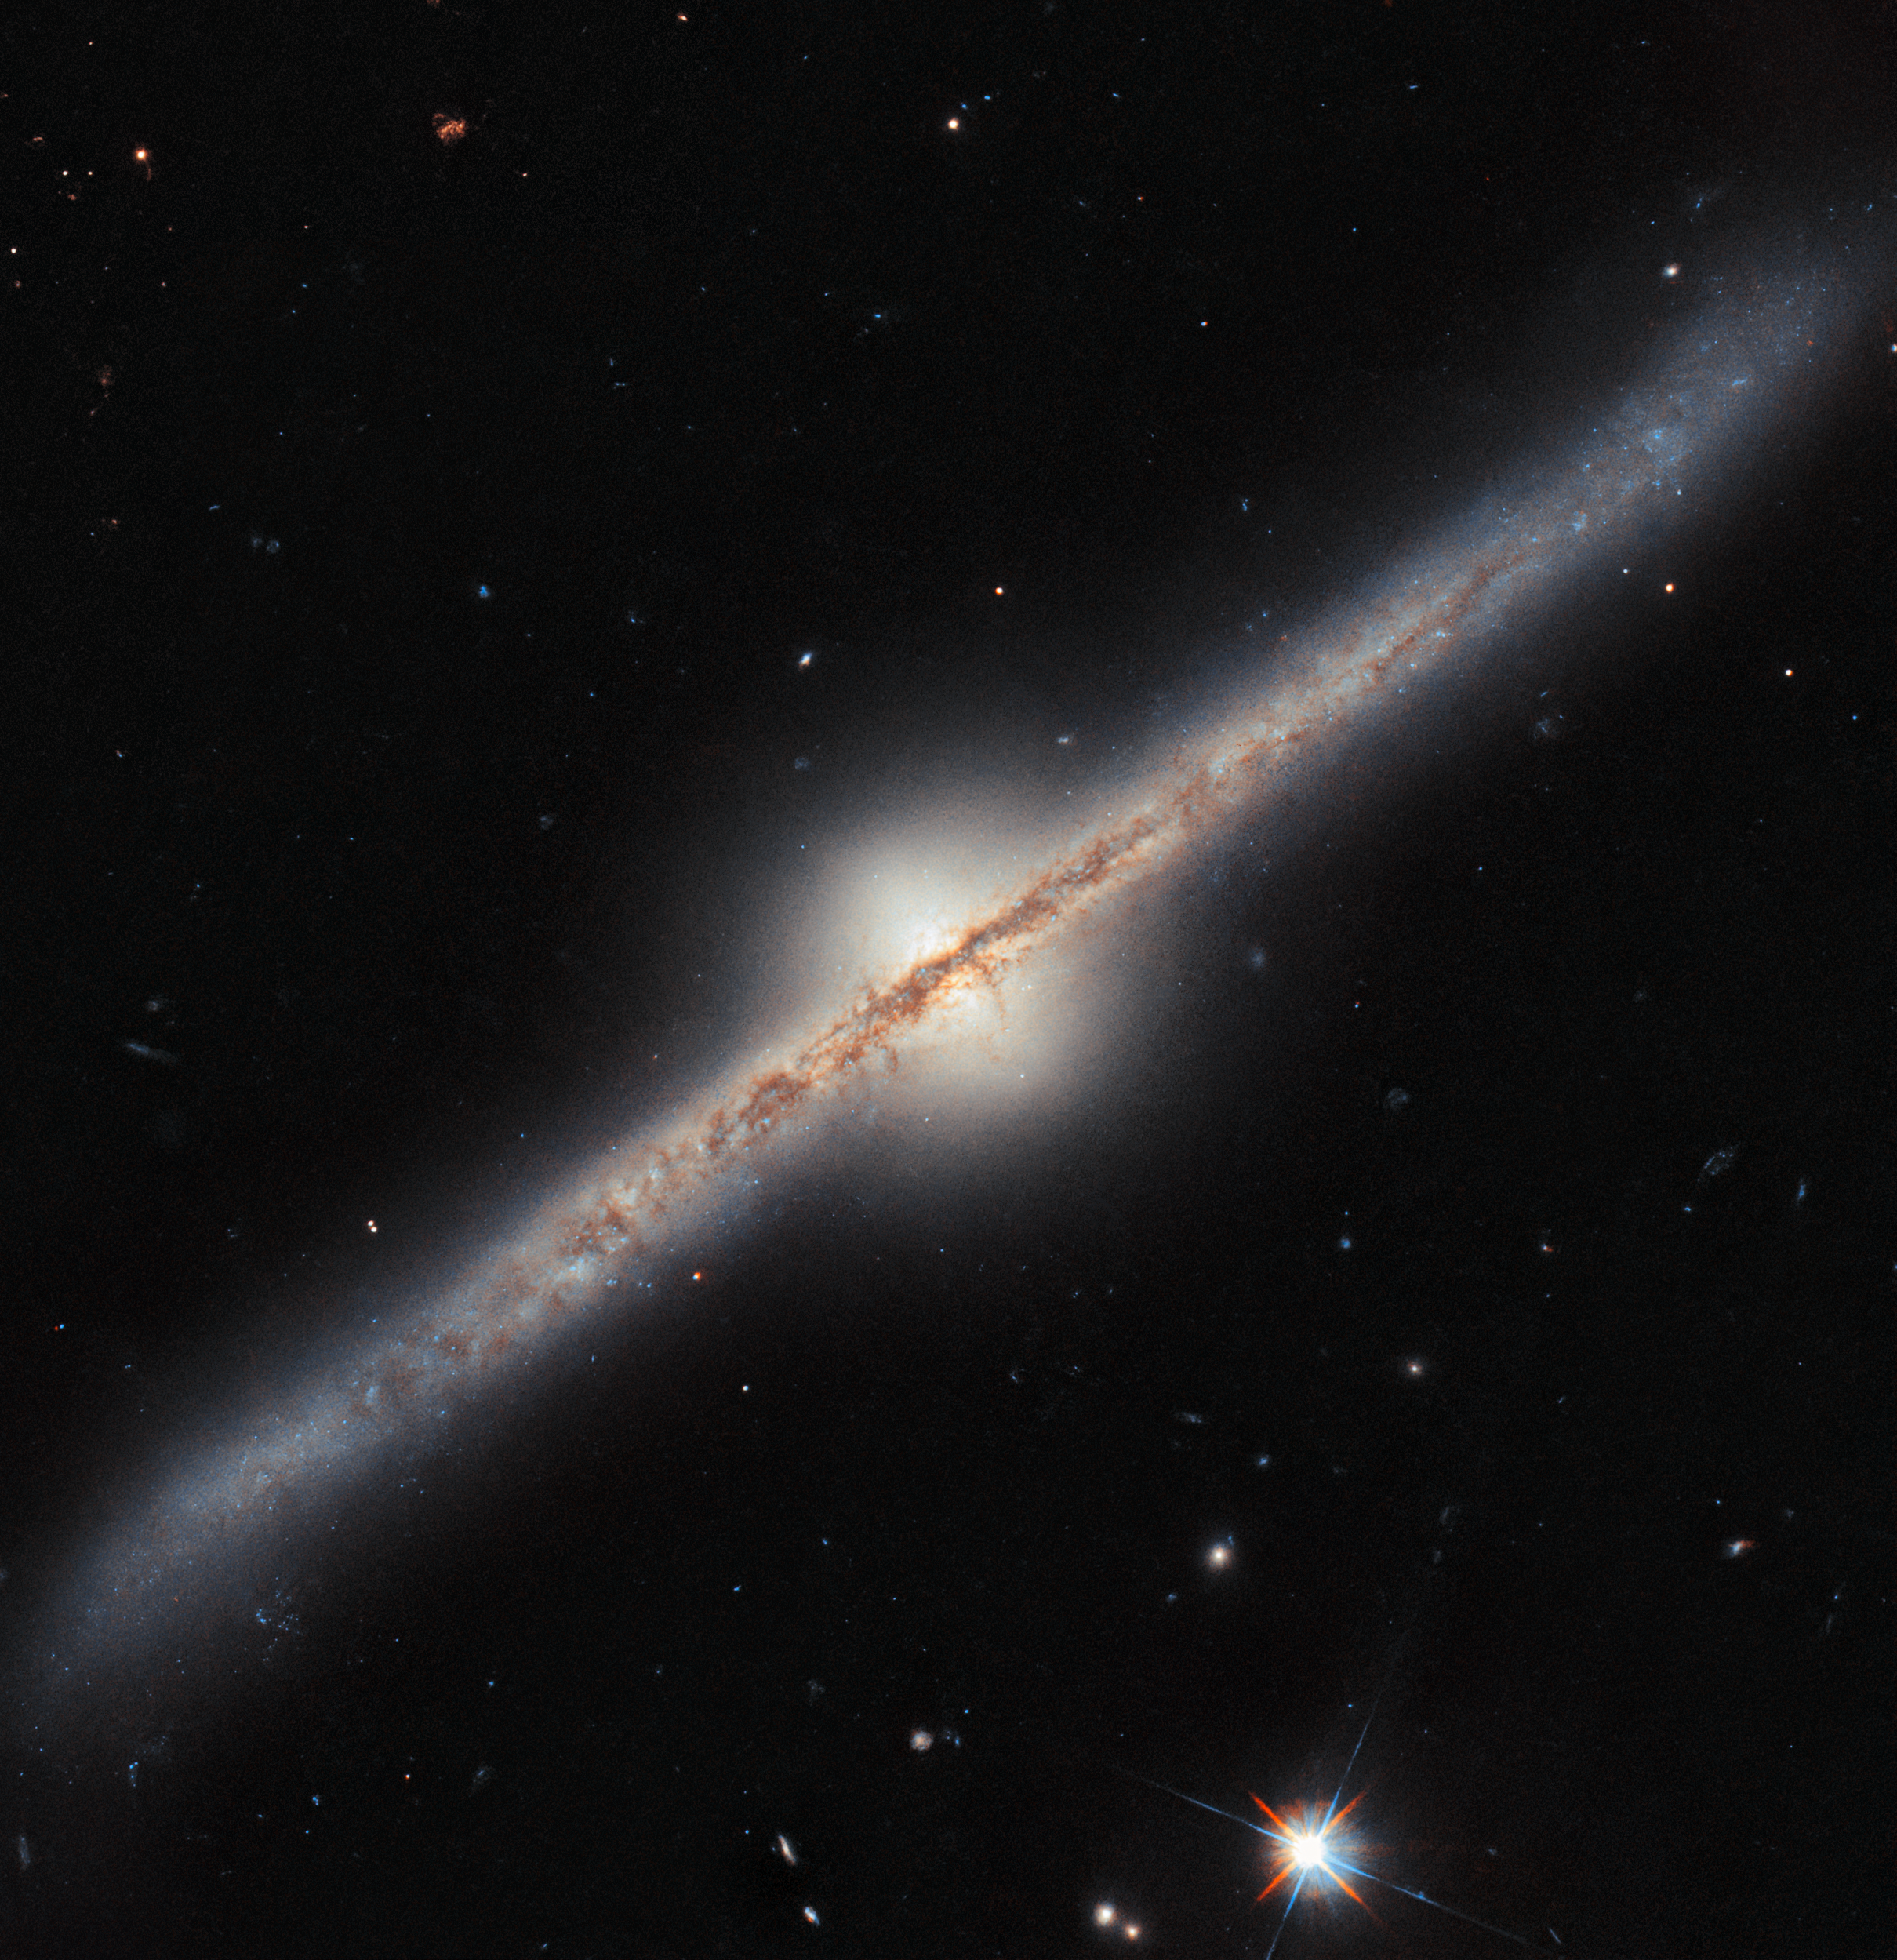

Spiral from the side

What kind of astronomical object is this? It doesn’t look quite like the kinds of galaxies, nebulae, star clusters or galaxy clusters which Hubble normally brings us images of. In fact, this is a spiral galaxy, named UGC 10043 — we just happen to be seeing it directly from the side! Located roughly 150 million light-years from Earth in the constellation Serpens, UGC 10043 is one of the somewhat rare spiral galaxies that are seen edge-on.

From this point of view, we see the galaxy’s disc as a sharp line through space, overlain with a prominent dust lane. This dust is spread across the spiral arms of UGC 10043, but it looks very thick and cloudy when viewed from the side. You can even see the lights of some active star-forming regions in the arms, shining out from behind the dust. Strikingly, we can also see that the centre of the galaxy sports a glowing, almost egg-shaped ‘bulge’, rising far above and below the disc. All spiral galaxies have a bulge like this one as part of their structure, containing stars that orbit the galactic centre on paths above and below the whirling disc; it’s a feature that isn’t normally obvious in pictures of galaxies. The unusually large size of this bulge compared to the galaxy’s disc is possibly thanks to UGC 10043 siphoning material from a nearby dwarf galaxy. This may also be why the disc is warped, bending up at one end and down at the other.

Like most of the full-colour Hubble images released by ESA/Hubble, this image is a composite, made up of several individual snapshots taken by Hubble at different times and capturing different wavelengths of light. You can see the exact images used in the sidebar on this page. A notable aspect of this image is that the two sets of Hubble data used were collected 23 years apart, in 2000 and 2023! Hubble’s longevity doesn’t just afford us the ability to produce new and better images of old targets; it also provides a long-term archive of data which only becomes more and more useful to astronomers.

Credit: ESA/Hubble & NASA, R. Windhorst, W. Keel